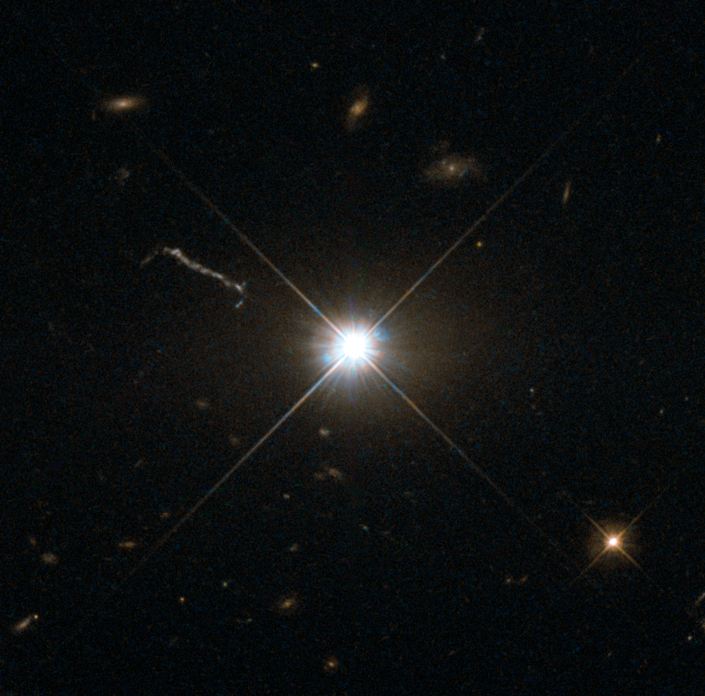

Best image of bright quasar 3C 273

This image from Hubble’s Wide Field and Planetary Camera 2 (WFPC2) is likely the best of ancient and brilliant quasar 3C 273, which resides in a giant elliptical galaxy in the constellation of Virgo (The Virgin). Its light has taken some 2.5 billion years to reach us. Despite this great distance, it is still one of the closest quasars to our home. It was the first quasar ever to be identified, by astronomers Maarten Schmidt and Bev Oke in the early 1960s.

The term quasar is an abbreviation of the phrase “quasi-stellar radio source”, as they appear to be star-like on the sky. In fact, quasars are the intensely powerful centres of distant, active galaxies, powered by a huge disc of particles surrounding a supermassive black hole. As material from this disc falls inwards, some quasars — including 3C 273 — have been observed to fire off super-fast jets into the surrounding space. In this picture, one of these jets appears as a cloudy streak, measuring some 200 000 light-years in length.

Quasars are capable of emitting hundreds or even thousands of times the entire energy output of our galaxy, making them some of the most luminous and energetic objects in the entire Universe. Of these very bright objects, 3C 273 is the brightest in our skies. If it was located 30 light-years from our own planet — roughly seven times the distance between Earth and Proxima Centauri, the nearest star to us after the Sun — it would still appear as bright as the Sun in the sky.

WFPC2 was installed on Hubble during shuttle mission STS-61. It is the size of a small piano and was capable of seeing images in the visible, near-ultraviolet, and near-infrared parts of the spectrum.

Editor's note (July 2024): This text was updated to correct an attribution.

Credit: ESA/Hubble & NASA